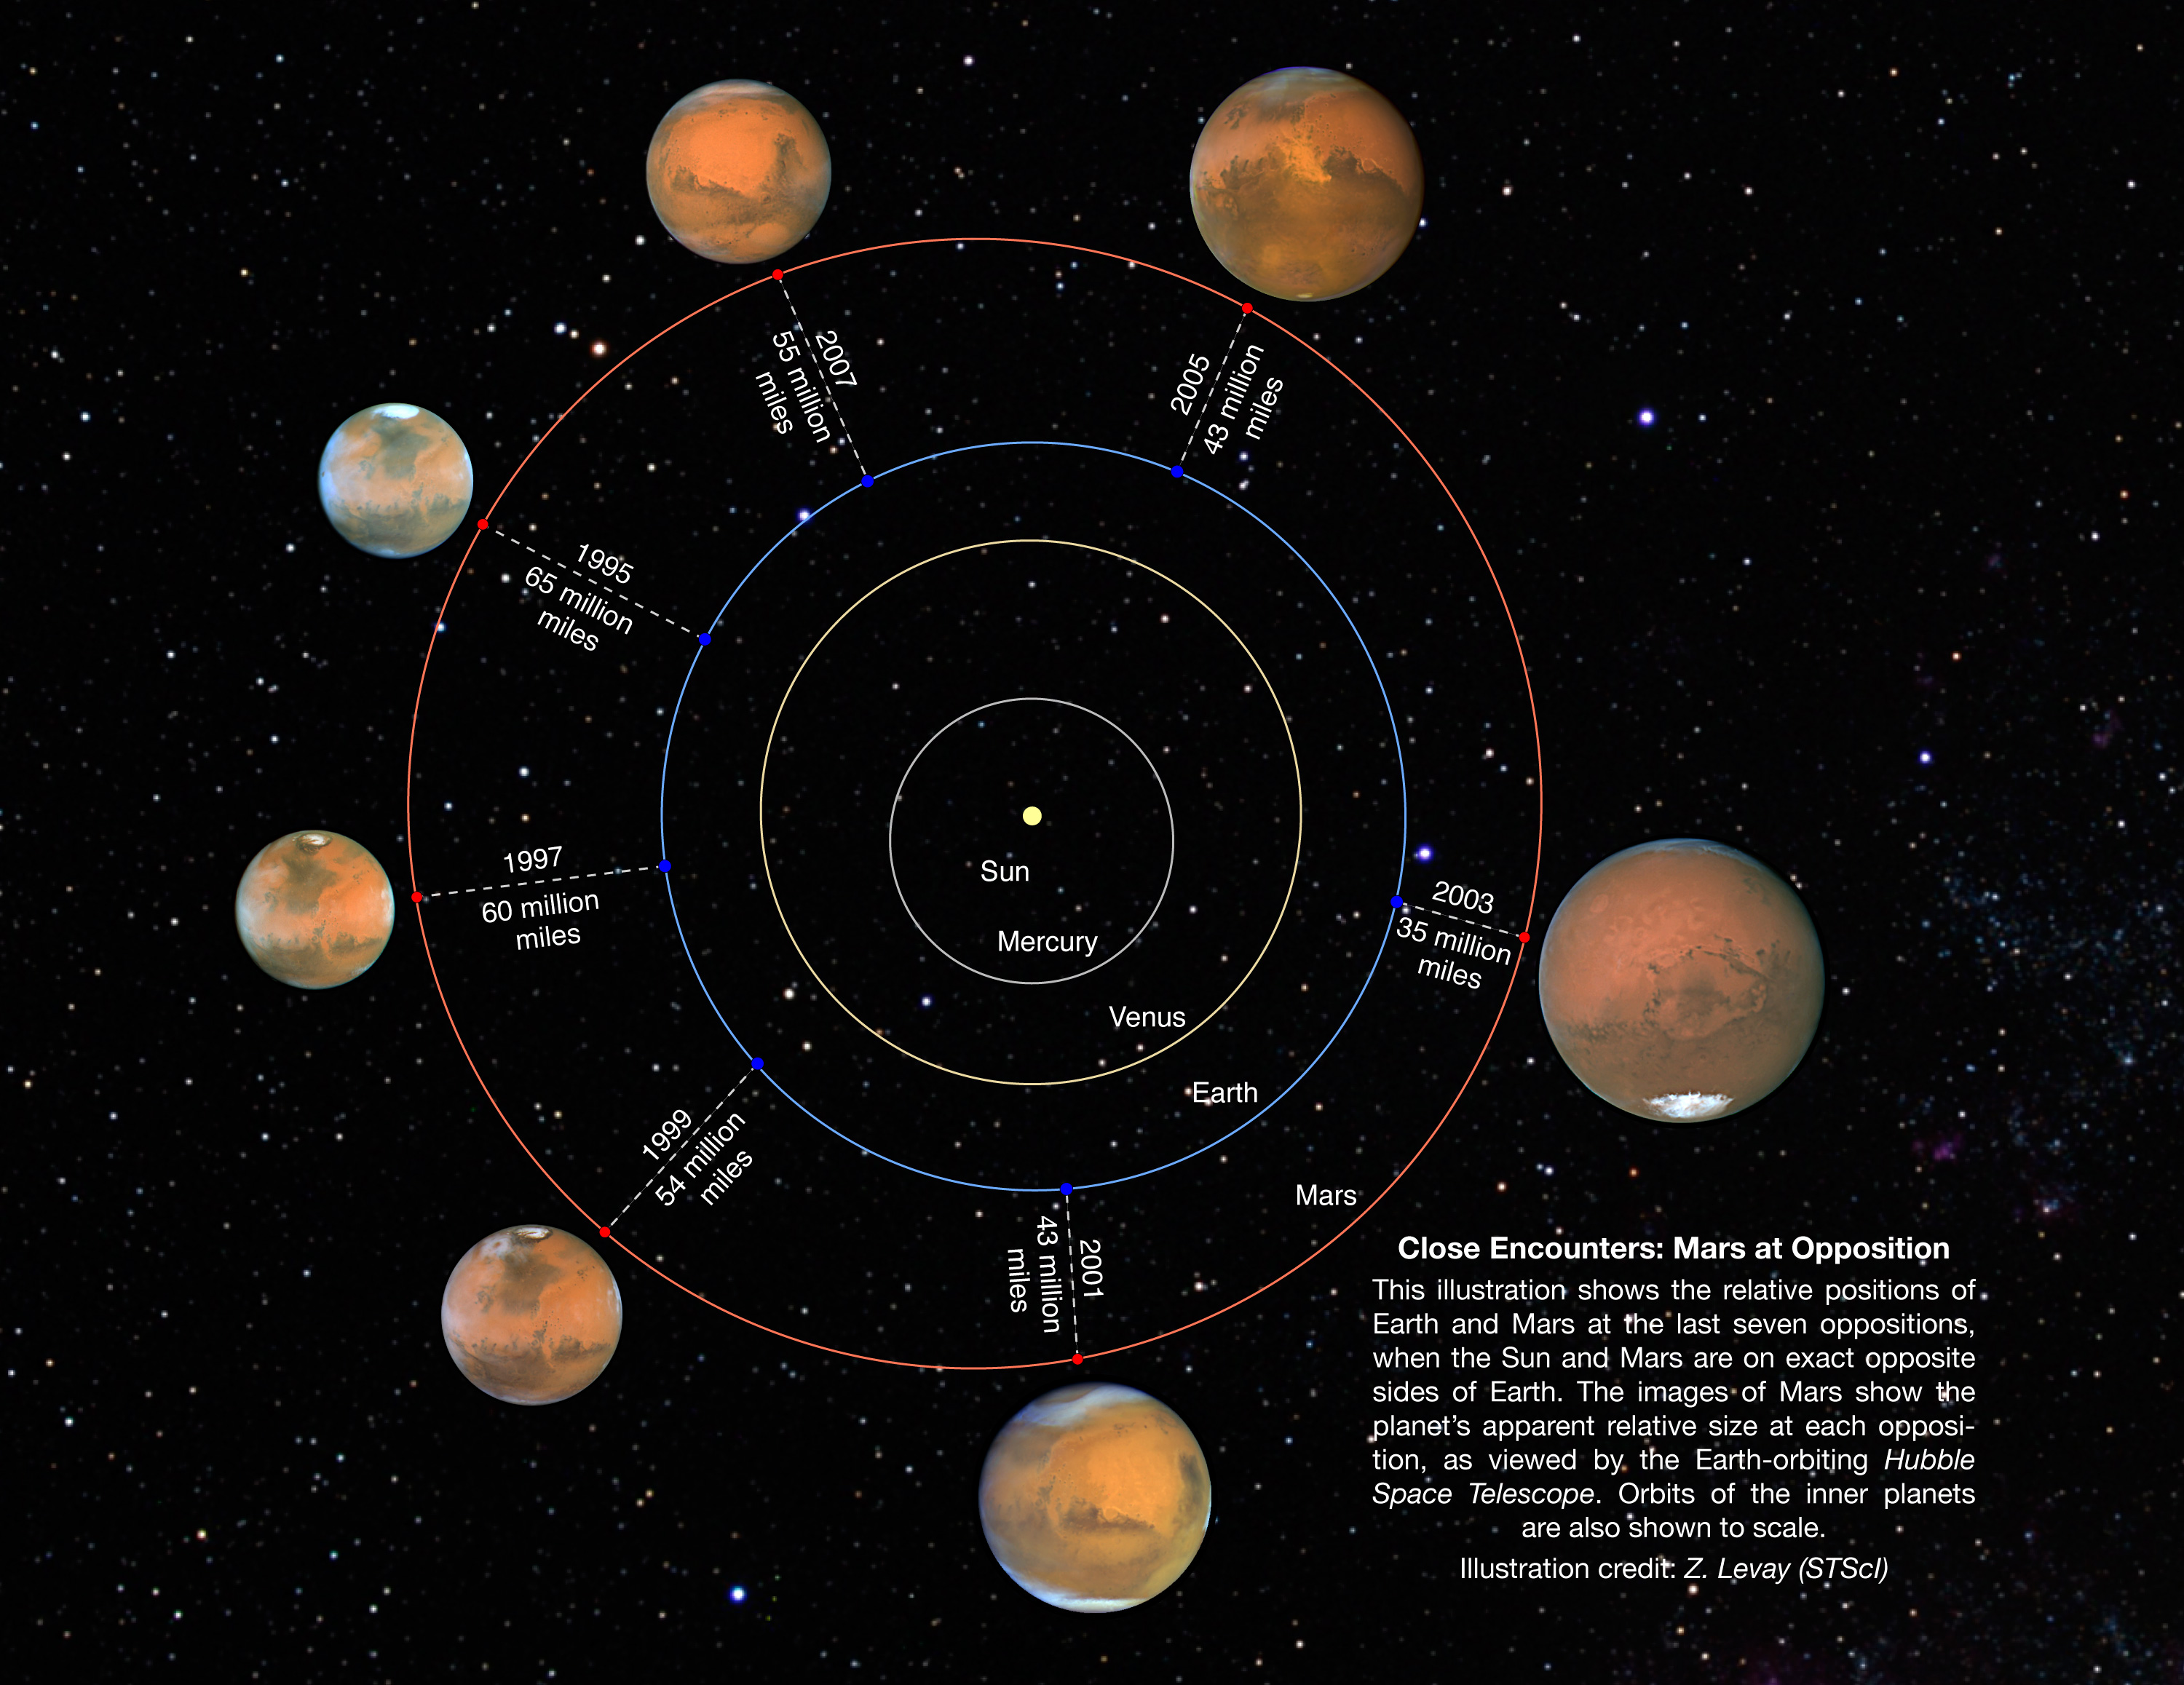

Relative Positions and Sizes for 1995-2007 Mars Oppositions

This illustration shows the relative positions of Earth and Mars at the last seven Martian oppositions from 1995 through 2007. Opposition occurs when the Sun and Mars are on exact opposite sides of Earth, resulting in a full-phase for Mars, similar to a full moon. The images of Mars show the planet's apparent relative size at each opposition, as viewed by the Earth-orbiting Hubble Space Telescope. Orbits of the inner planets are to scale.

Credit: NASA, ESA, and Z. Levay (STScI)